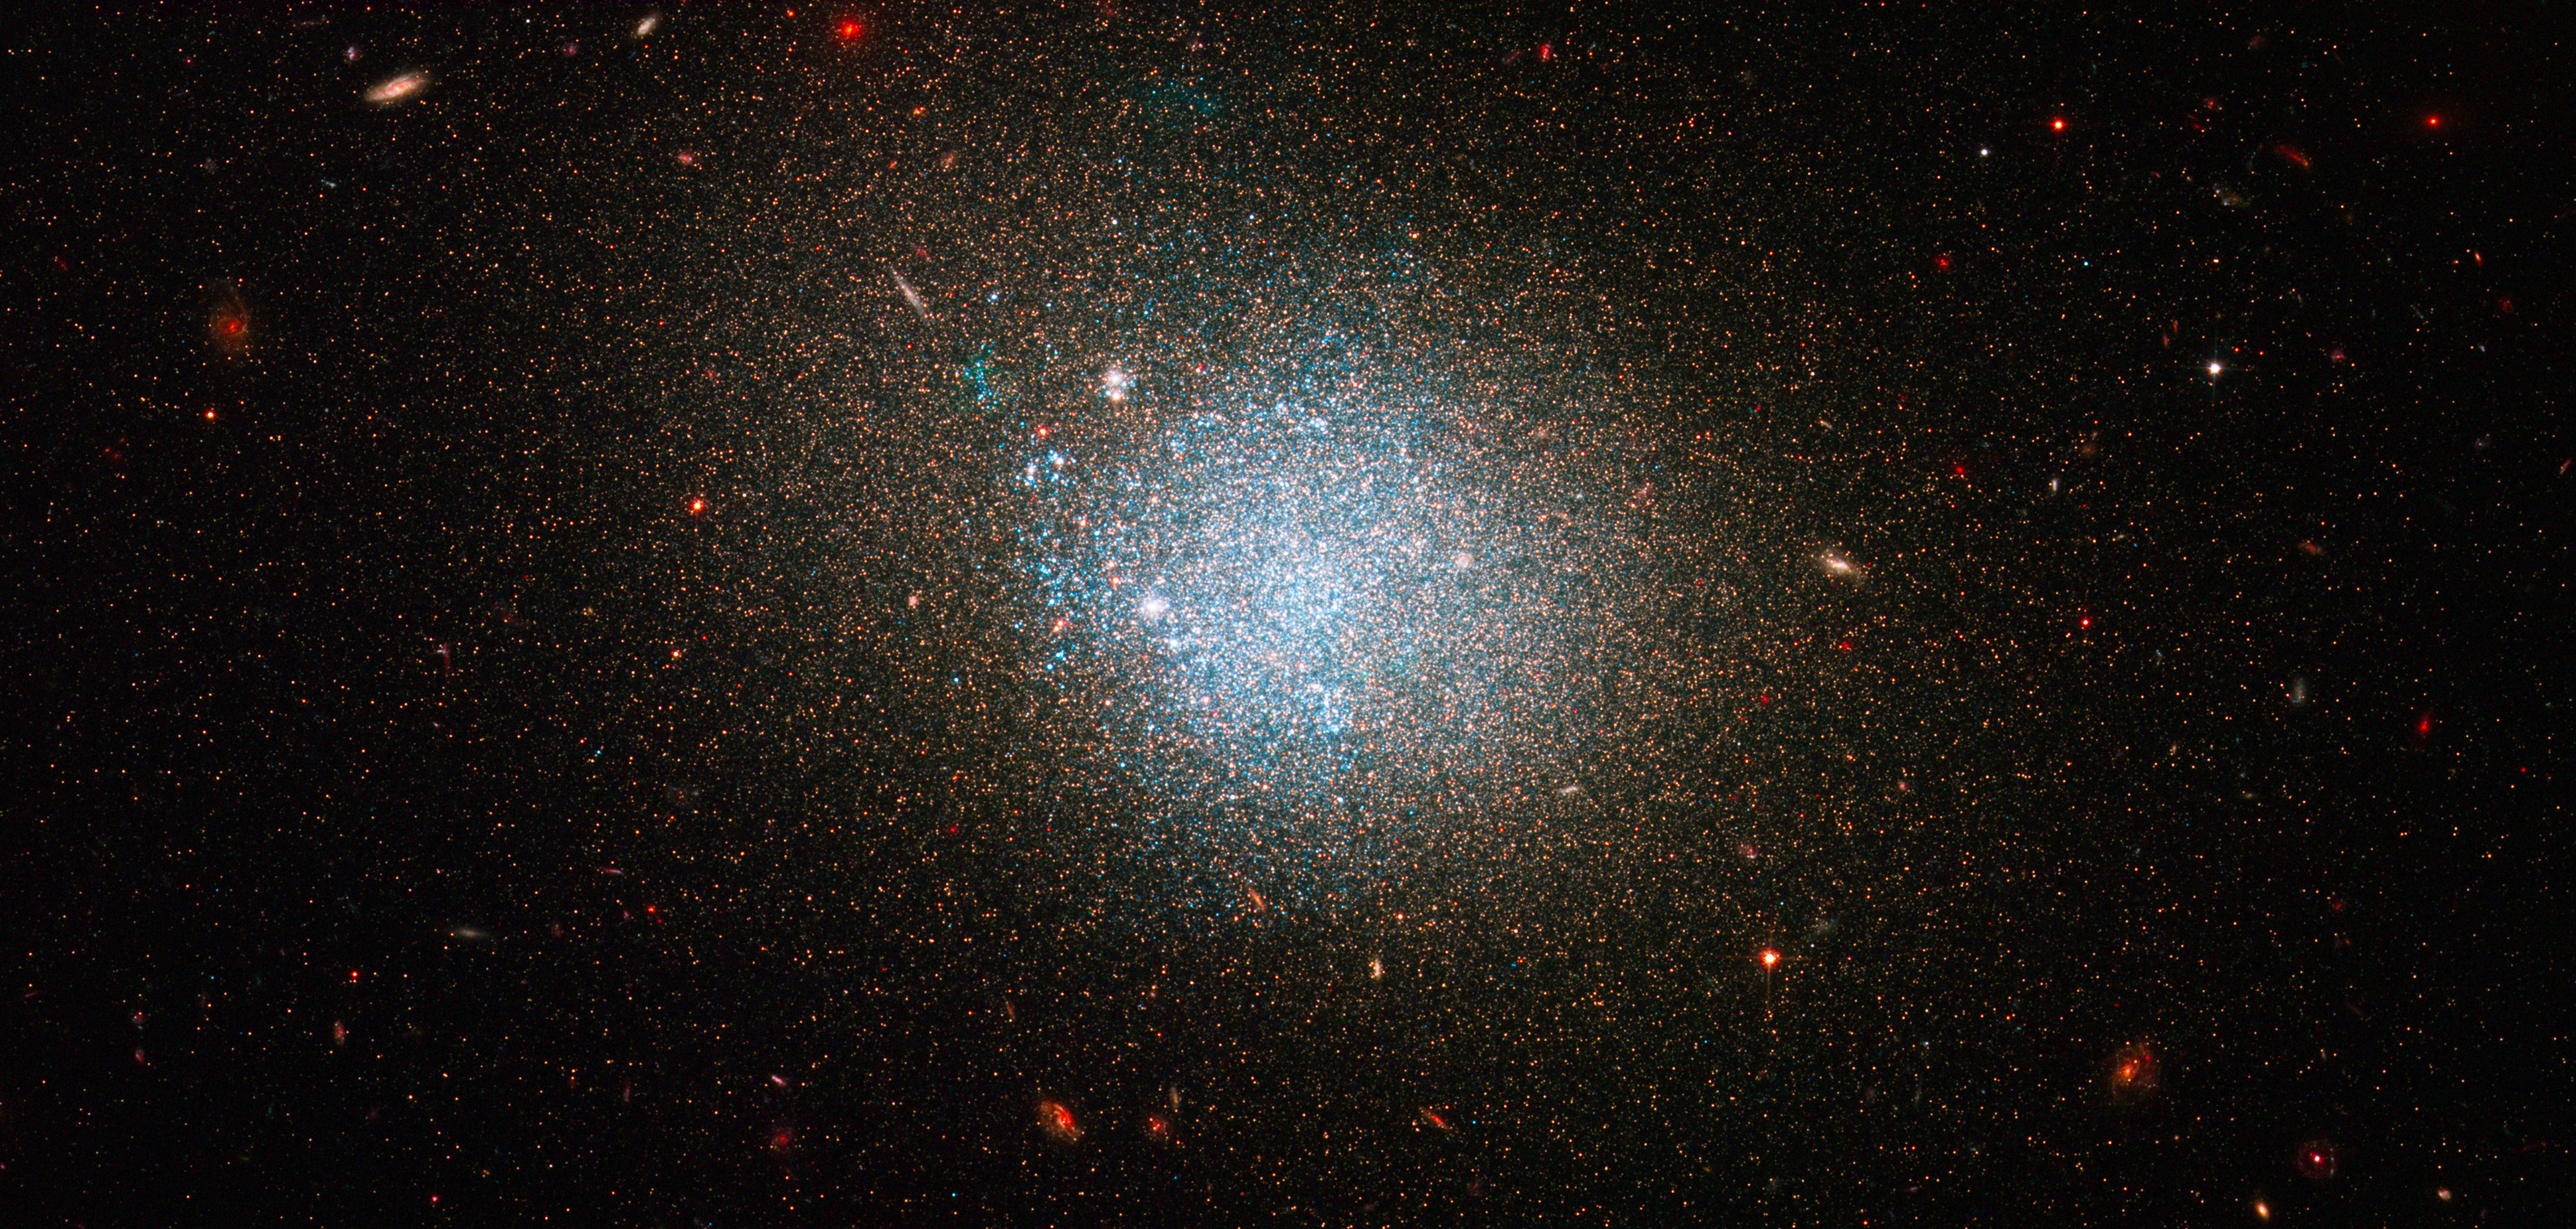

NGC 4163

This image shows a swarm of young, blue stars in the diffuse dwarf irregular galaxy NGC 4163. It is a member of a group of dwarf galaxies near our Milky Way and is located roughly 10 million light-years away.

Credit: NASA, ESA, J. Dalcanton and B. Williams (University of Washington)